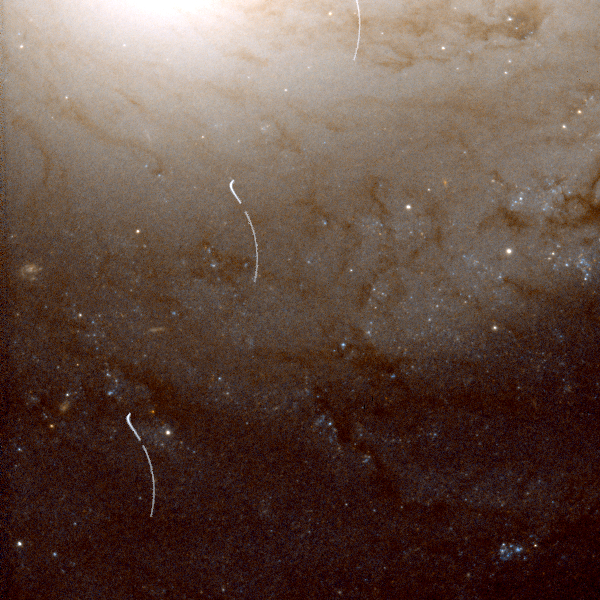

Broken Asteroid Trail in NGC 4548

This is a broken asteroid trail crossing the outer regions of galaxy NGC 4548 in Coma Berenices. Five trail segments (shown in white) were extracted from individual exposures and added to a cleaned colour image of the galaxy.

The asteroid enters the image at top center and moves down toward the lower left. Large gaps in the trail occur because the telescope is orbiting the Earth and cannot continuously observe the galaxy.

Credit: R. Evans and K. Stapelfeldt (Jet Propulsion Laboratory) and NASA/ESA